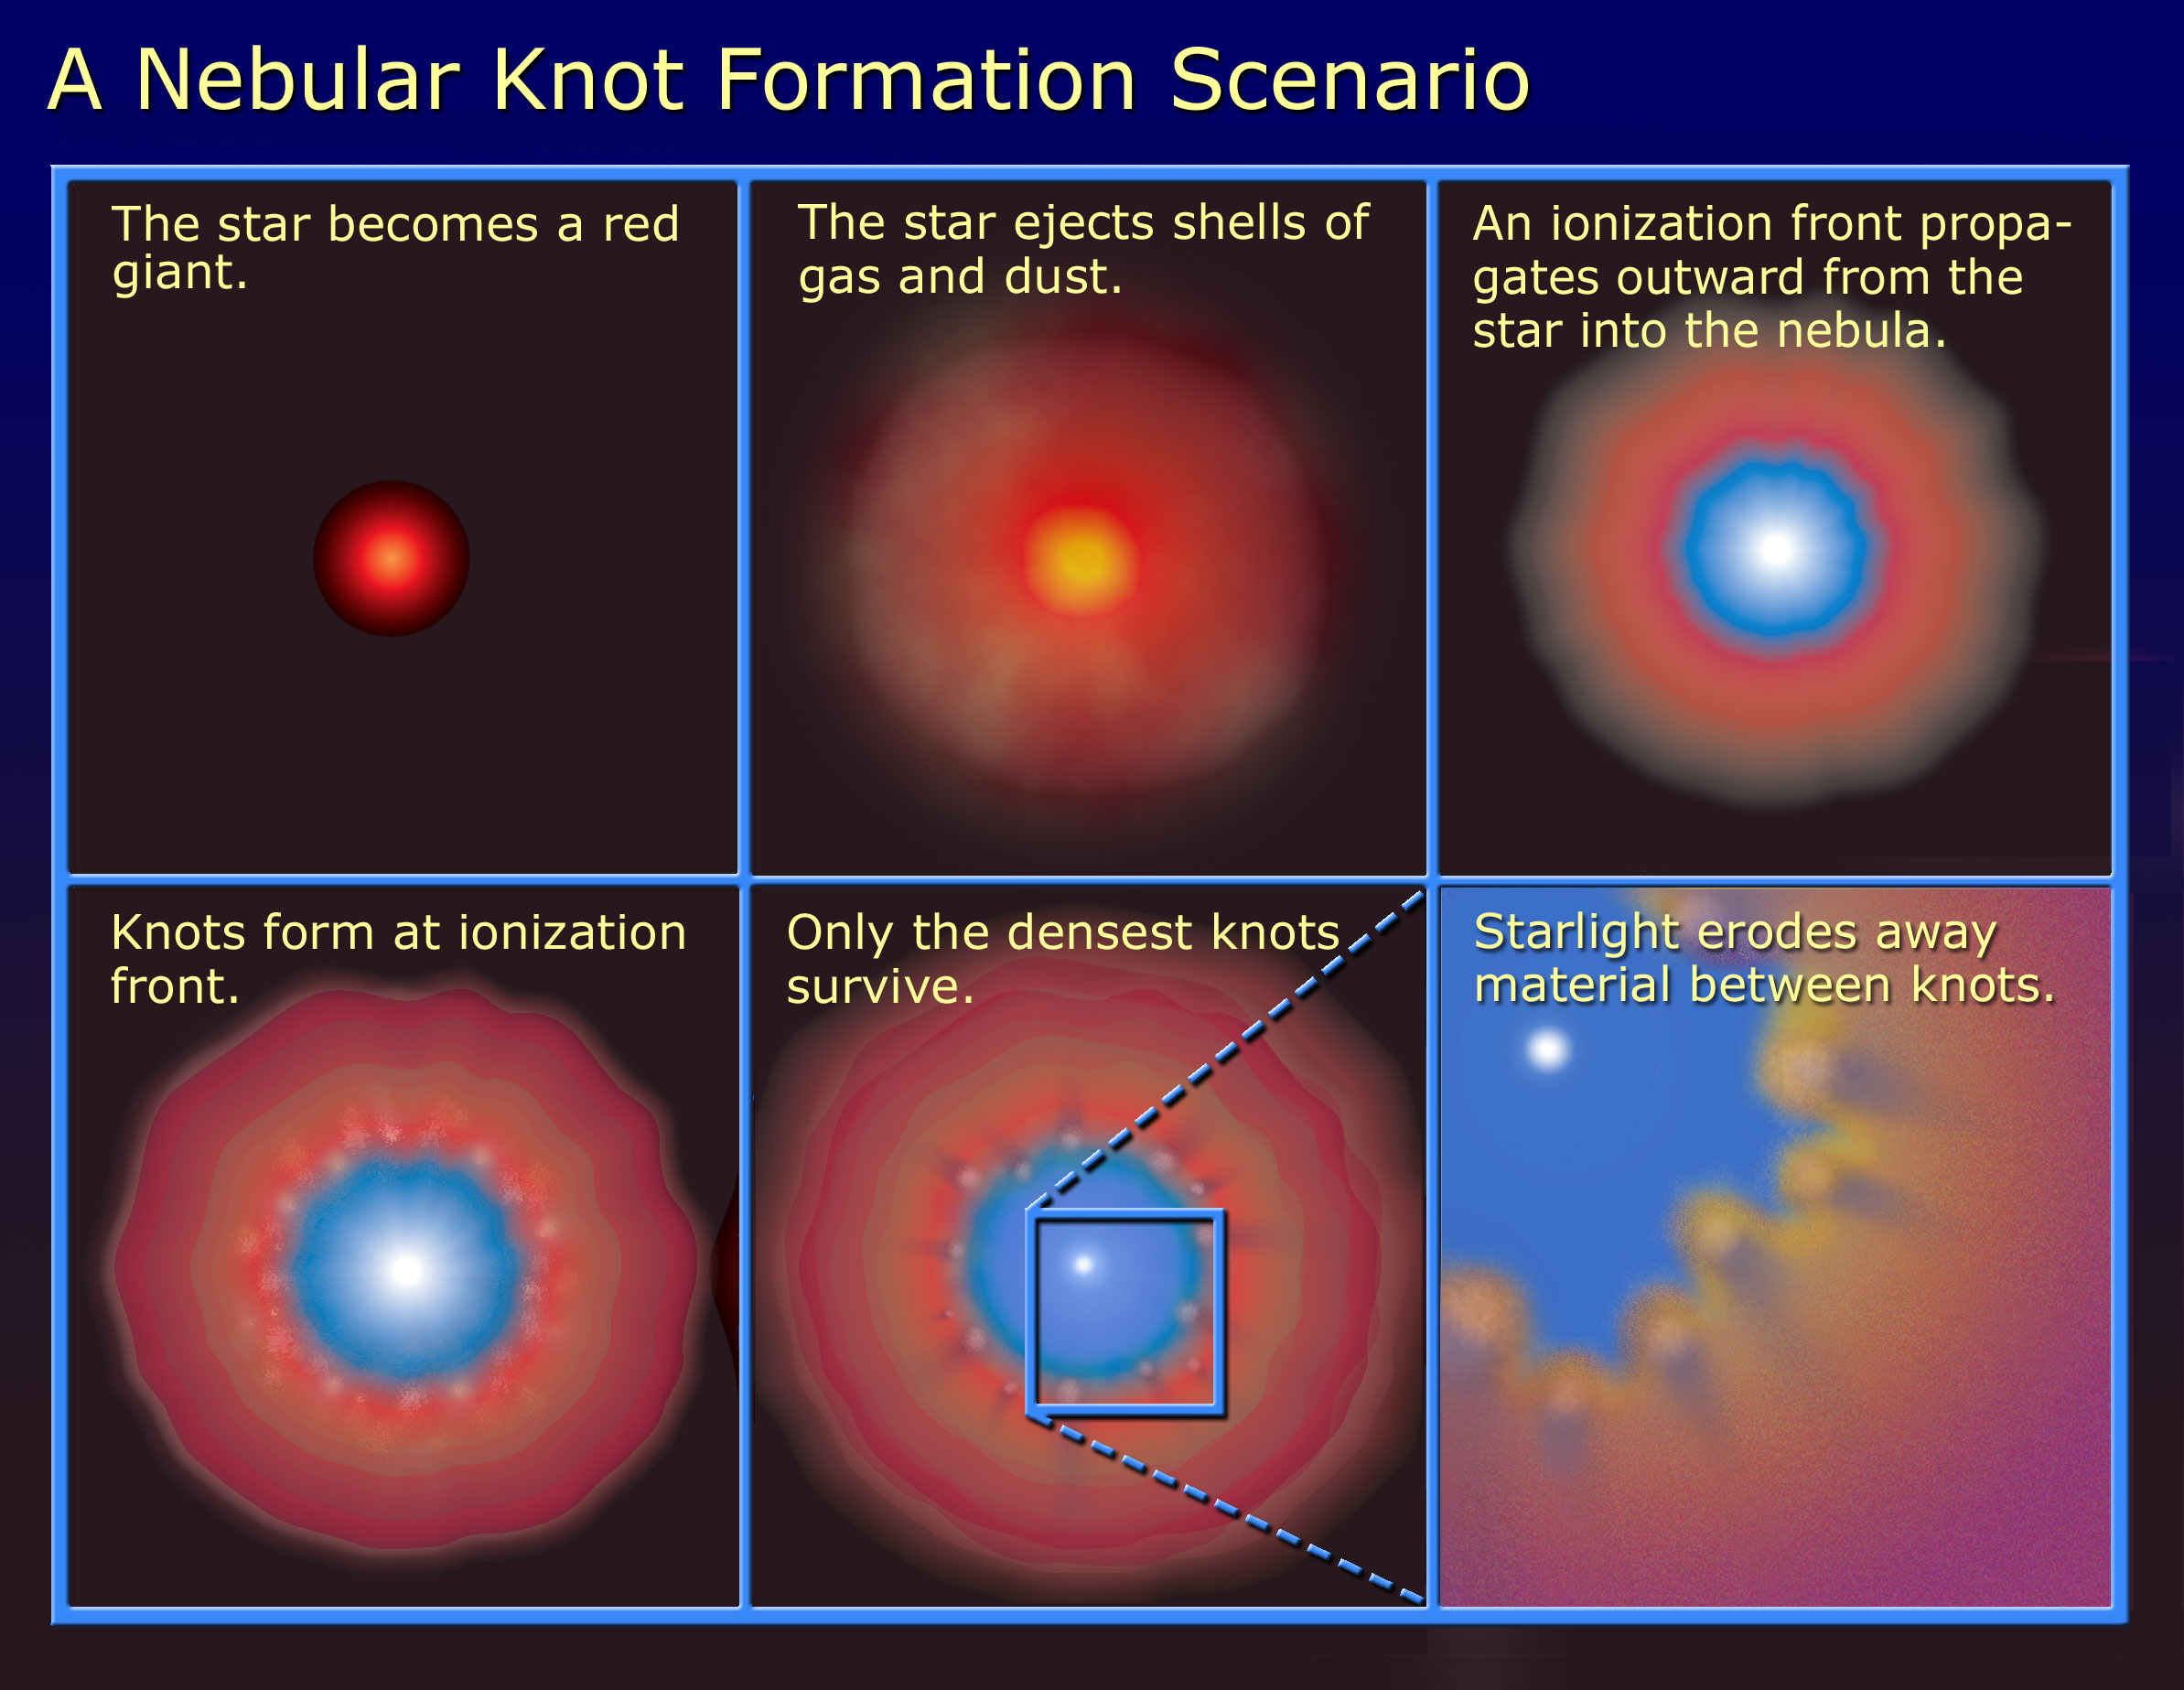

A Nebula Knot Formation Scenario

Diagram explaining how knots form in a nebula.

Credit: NASA/ESA and A. Feild (STScI).